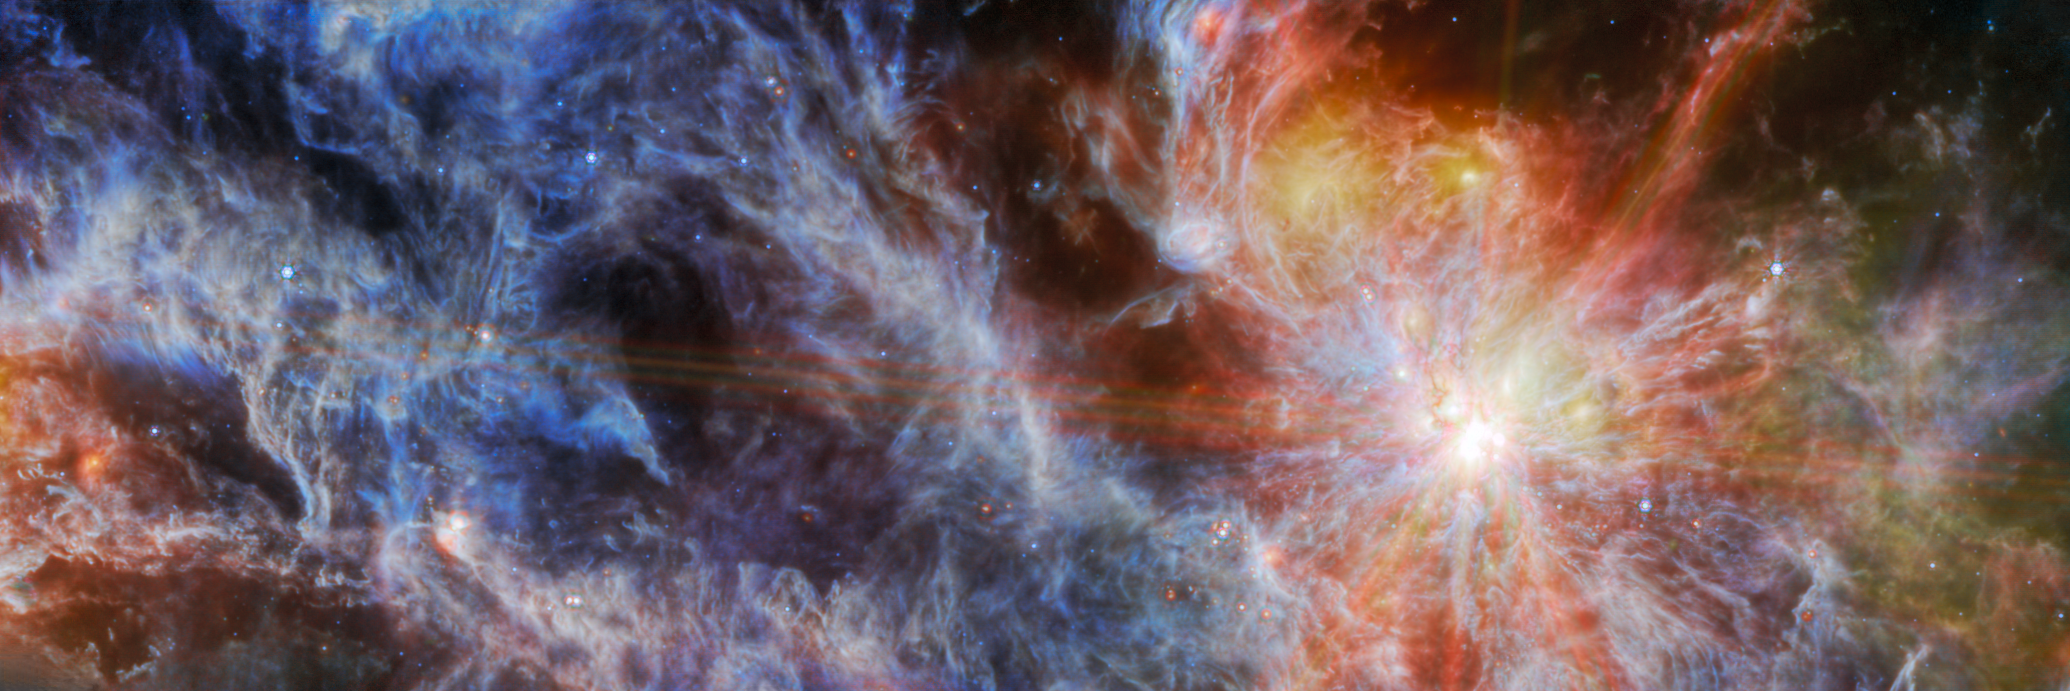

S1 LMC N79 (cropped)

This image from the NASA/ESA/CSA James Webb Space Telescope features an H II region in the Large Magellanic Cloud (LMC), a satellite galaxy of our Milky Way. This nebula, known as N79, is a region of interstellar atomic hydrogen that is ionised, captured here by Webb’s Mid-InfraRed Instrument (MIRI).

This image is a cropped view of the wider N79 region. The full image can be seen here.

N79 is a massive star-forming complex spanning roughly 1630 light-years in the generally unexplored southwest region of the LMC. N79 is typically regarded as a younger version of 30 Doradus (also known as the Tarantula Nebula), another of Webb’s recent targets. Research suggests that N79 has a star formation efficiency exceeding that of 30 Doradus by a factor of two over the past 500 000 years.

This particular image centres on one of the three giant molecular cloud complexes, dubbed N79 South (S1 for short). The distinct ‘starburst’ pattern surrounding this bright object is a series of diffraction spikes. All telescopes which use a mirror to collect light, as Webb does, have this form of artifact which arises from the design of the telescope. In Webb's case, the six largest starburst spikes appear because of the hexagonal symmetry of Webb's 18 primary mirror segments. Patterns like these are only noticeable around very bright, compact objects, where all the light comes from the same place. Most galaxies, even though they appear very small to our eyes, are darker and more spread out than a single star, and therefore do not show this pattern.

At the longer wavelengths of light captured by MIRI, Webb’s view of N79 showcases the region’s glowing gas and dust. This is because mid-infrared light is able to reveal what is happening deeper inside the clouds (while shorter wavelengths of light would be absorbed or scattered by dust grains in the nebula). Some still-embedded protostars also appear in this field.

Star-forming regions such as this are of interest to astronomers because their chemical composition is similar to that of the gigantic star-forming regions observed when the Universe was only a few billion years old and star formation was at its peak. Star-forming regions in our Milky Way galaxy are not producing stars at the same furious rate as N79, and have a different chemical composition. Webb is now providing astronomers the opportunity to compare and contrast observations of star formation in N79 with the telescope’s deep observations of distant galaxies in the early Universe.

These observations of N79 are part of a Webb programme that is studying the evolution of the circumstellar discs and envelopes of forming stars over a wide range in mass and at different evolutionary stages. Webb’s sensitivity will enable scientists to detect for the first time the planet-forming dust discs around stars of similar mass to that of our Sun at the distance of the LMC.

This image includes 7.7-micron light shown in blue, 10 microns in cyan, 15 microns in yellow, and 21 microns in red (770W, 1000W, 1500W, and 2100W filters, respectively).

Credit: ESA/Webb, NASA & CSA, O. Nayak, M. Meixner